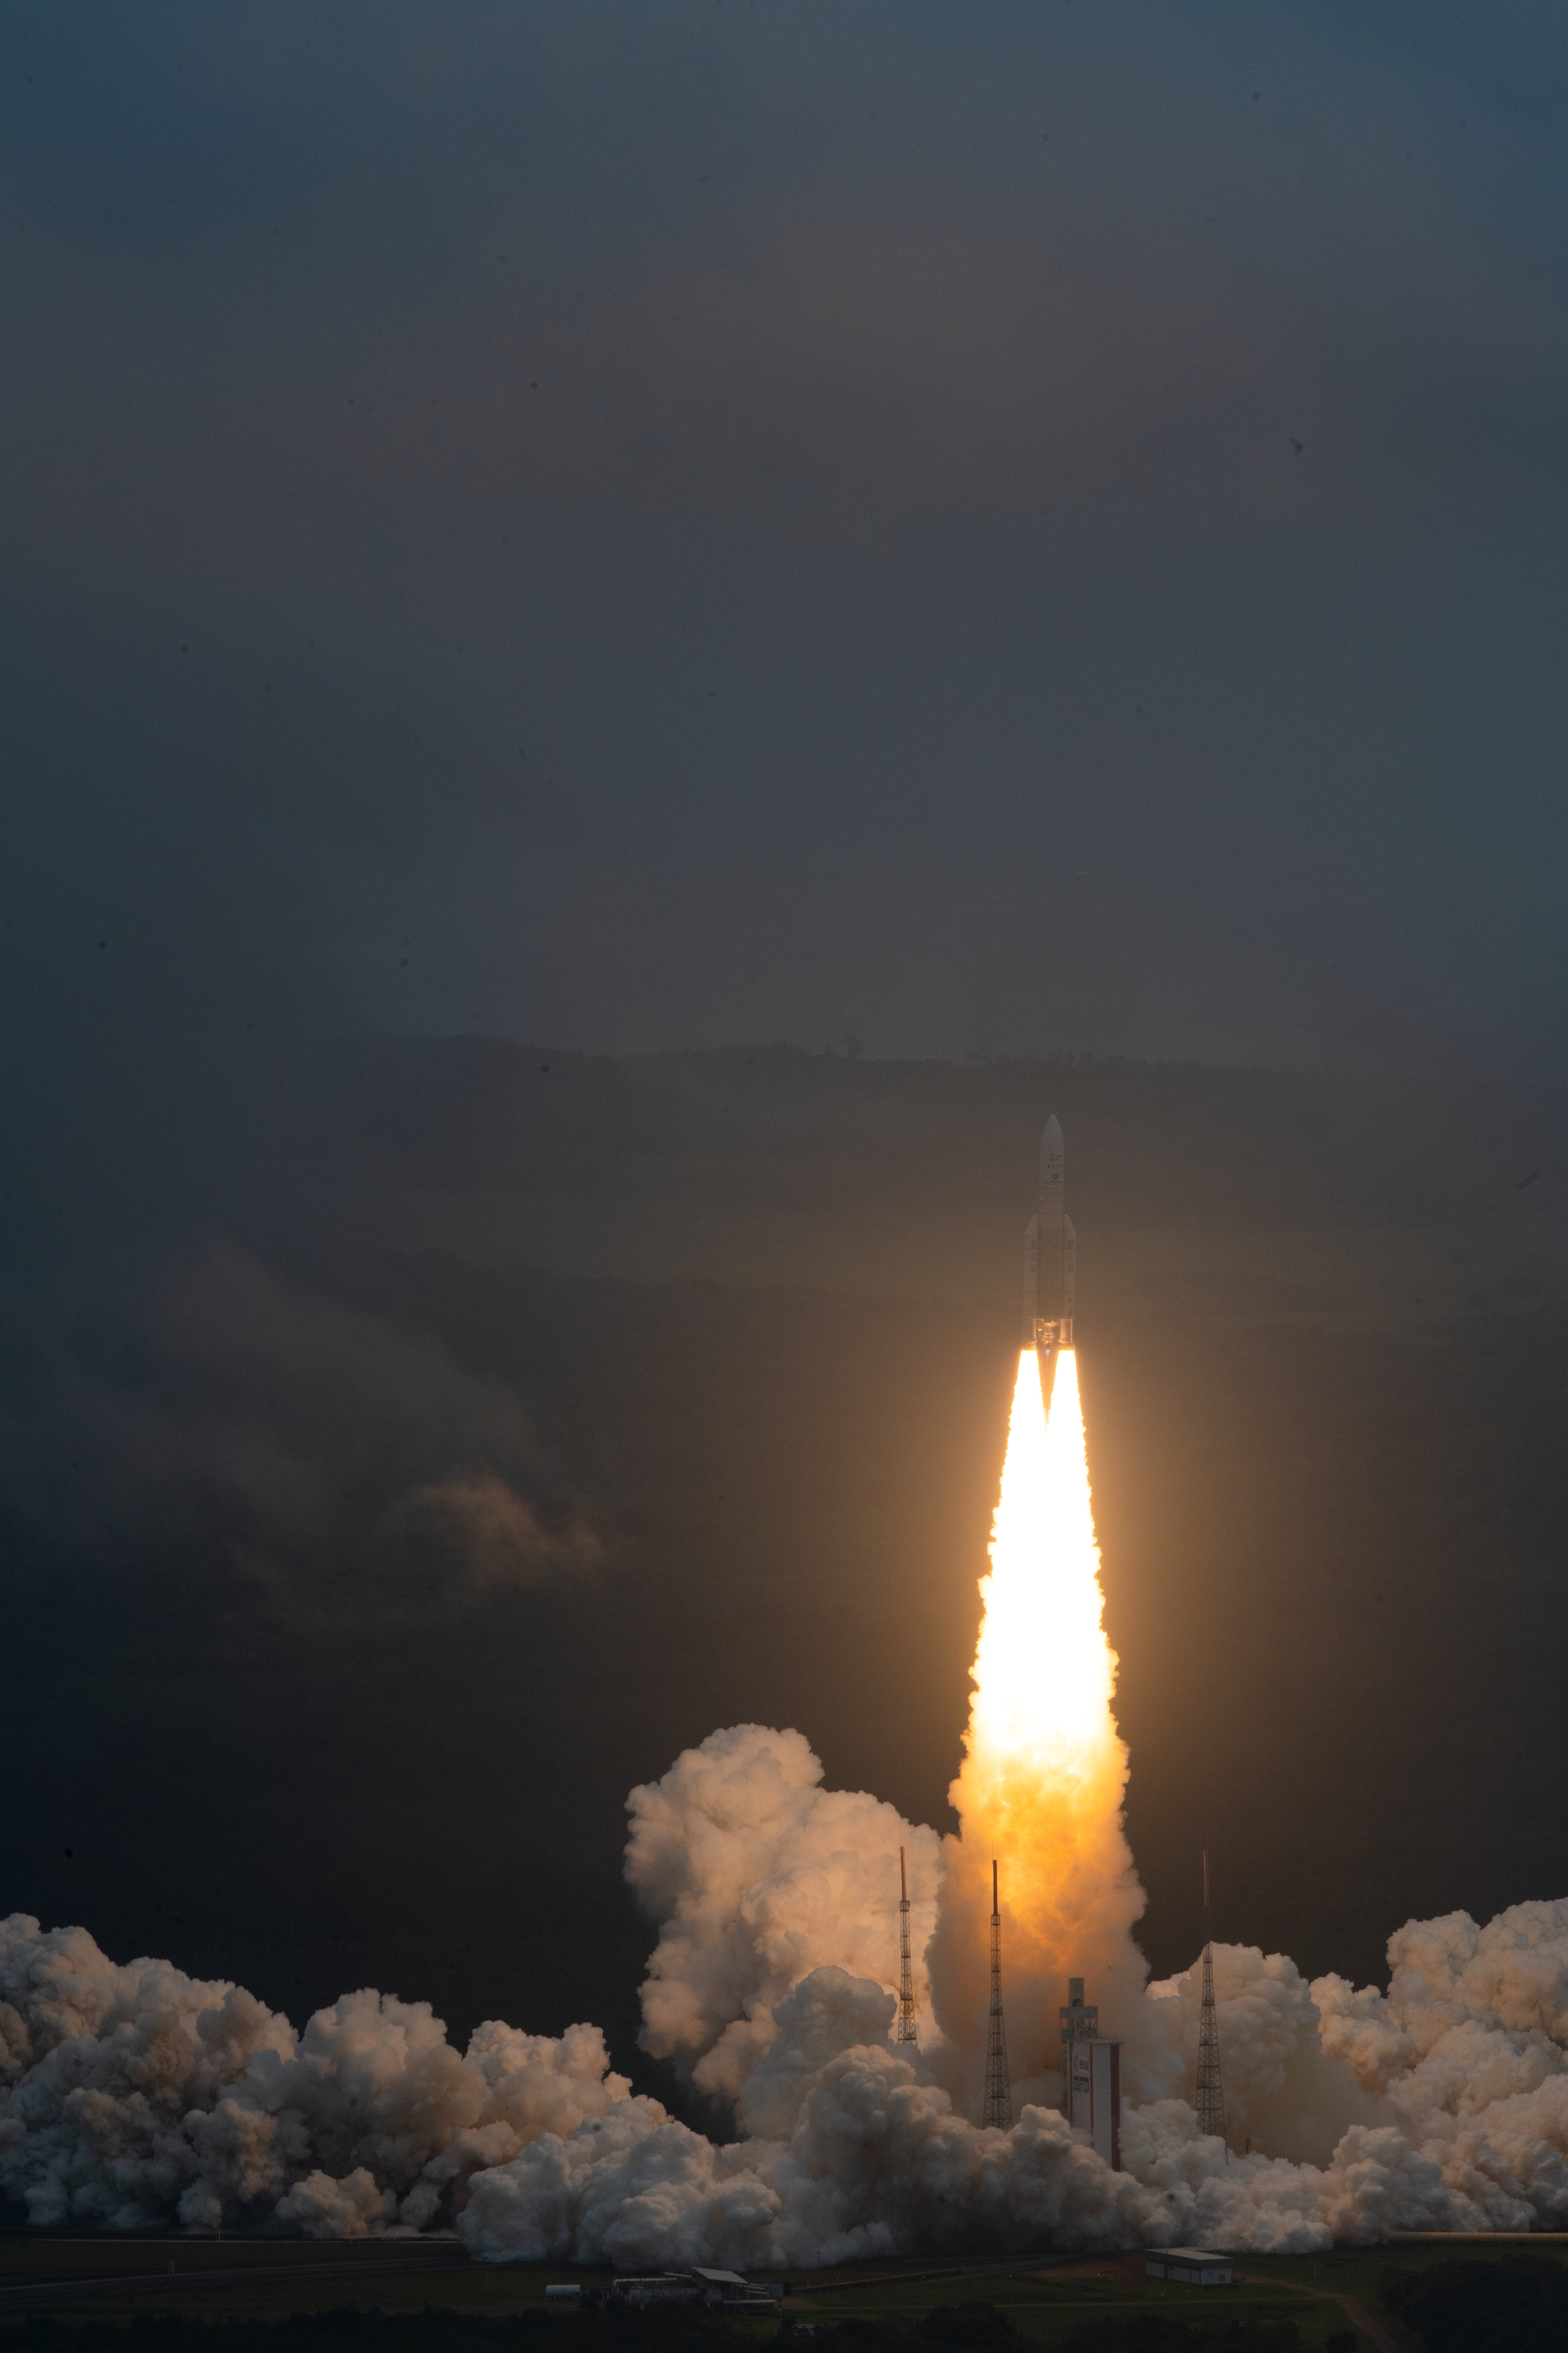

Webb liftoff on Ariane 5

The James Webb Space Telescope lifted off on an Ariane 5 rocket from Europe’s Spaceport in French Guiana, at 13:20 CET on 25 December on its exciting mission to unlock the secrets of the Universe.

Credit: ESA/CNES/Arianespace